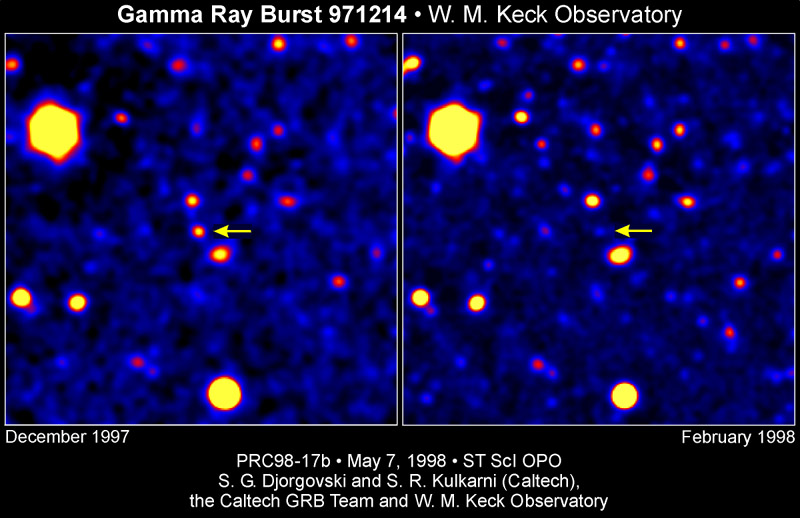

Gamma ray burst 971214

Images of the GRB 971214 field, obtained with the W.M. Keck 10-meter telescope on Mauna Kea, Hawaii.

The image on the left shows the visible-light afterglow of the burst (marked with an arrow), obtained about two days after the burst, while it was still relatively bright.

The image on the right shows the same field as seen about two months later, after the burst afterglow has faded away, revealing a faint galaxy at its position (also marked with an arrow). The measurement of its distance shows it to be some 12 billion light years away (assuming the current best guess of the age of the universe of about 14 billion years).

Credit: S. G. Djorgovski and S. R. Kulkarni (Caltech), the Caltech GRB Team, and W. M. Keck Observatory